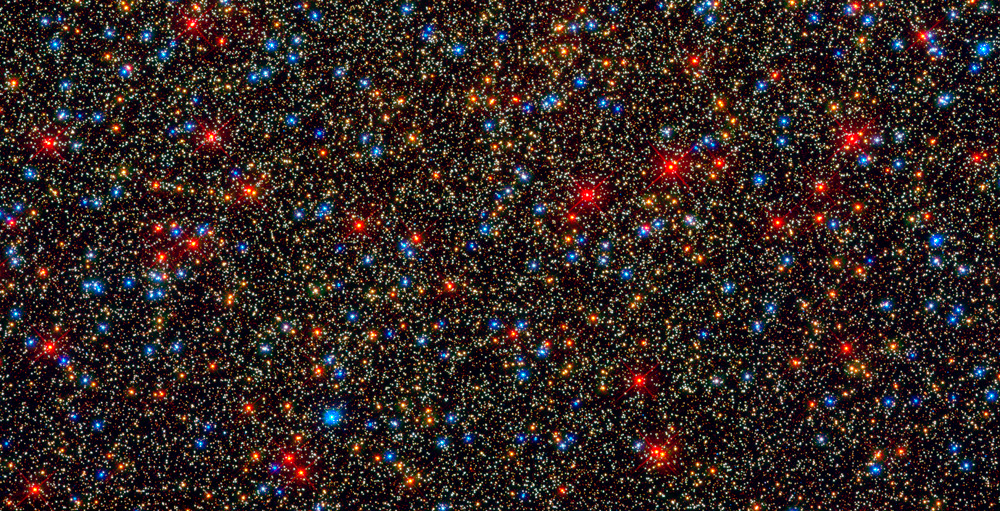

Hubblecast 30: rebirth of an icon

After more than three months of calibration and testing, the NASA/ESA Hubble Space Telescope is reopening its rejuvenated eyes to begin probing the Universe once again. Dr. J reveals the stunning new images and the fascinating science behind them.

Credit: NASA & ESA